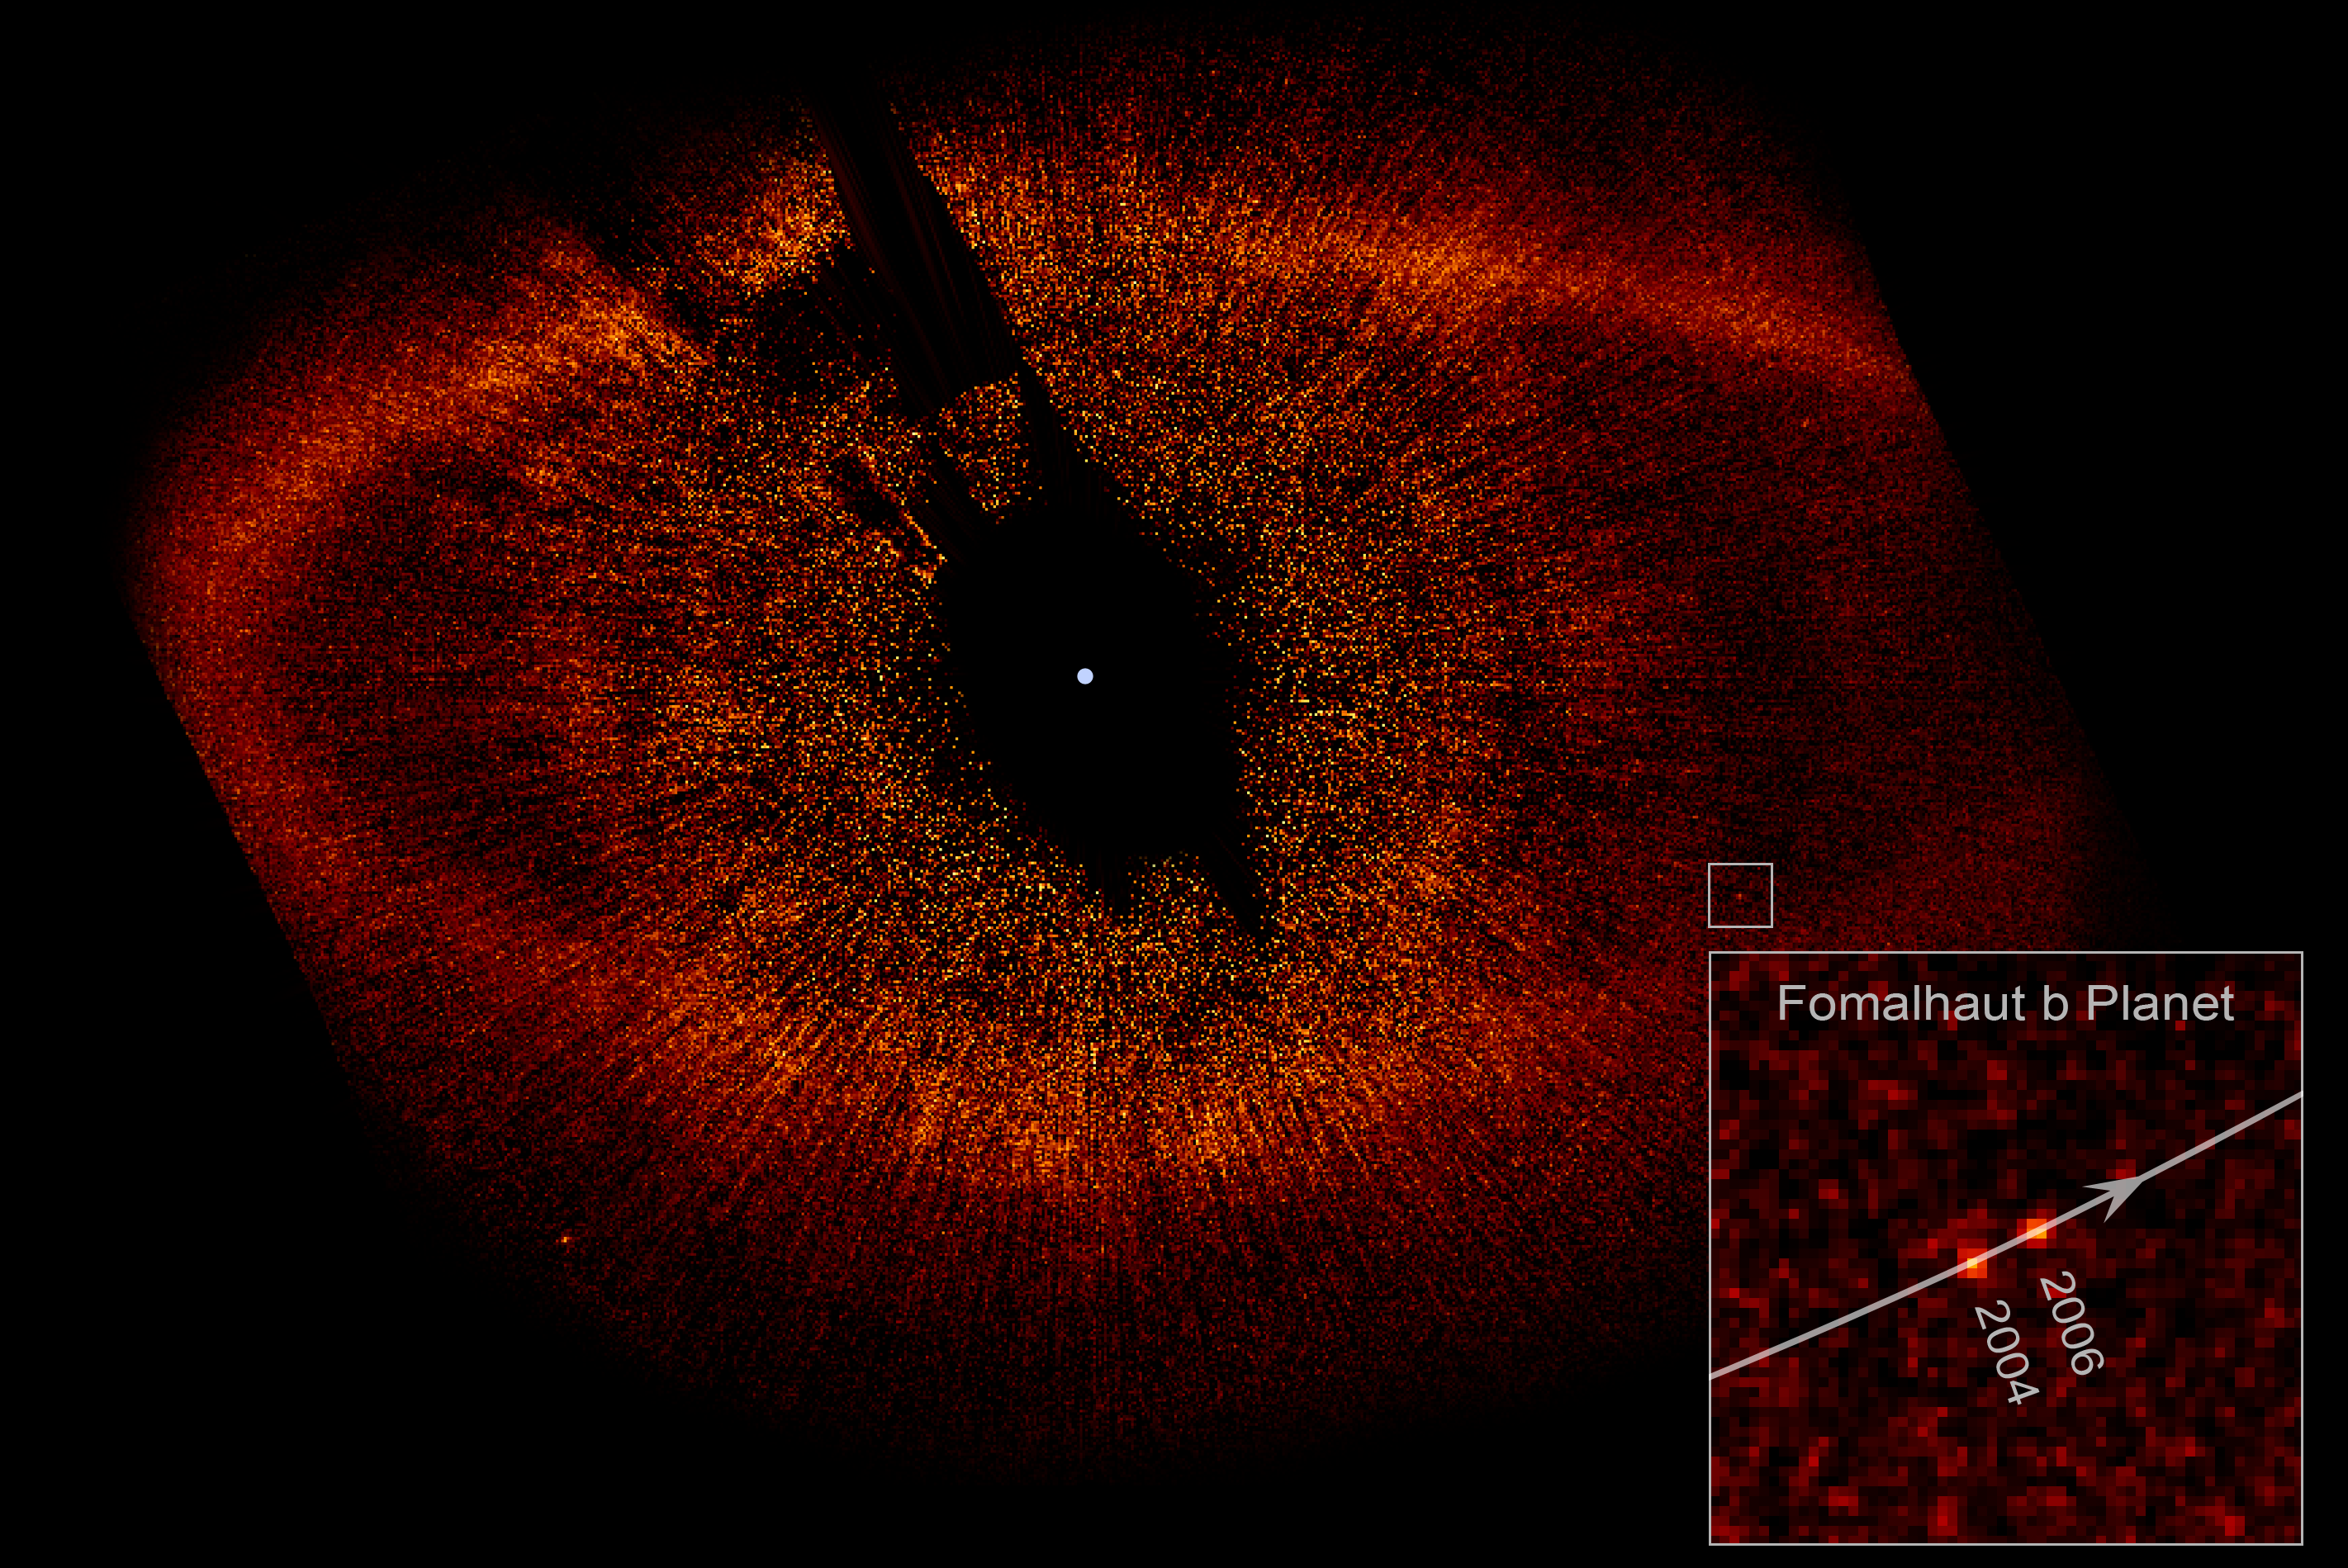

Fomalhaut and Fomalhaut b

This image, taken with the Advanced Camera for Surveys aboard the NASA/ESA Hubble Space Telescope, shows the newly discovered planet, Fomalhaut b, orbiting its parent star, Fomalhaut.

The small white box at lower right pinpoints the planet's location. Fomalhaut b has carved a path along the inner edge of a vast, dusty debris ring encircling Fomalhaut that is 34.5 billion kilometres across. Fomalhaut b lies three billion kilometres inside the ring's inner edge and orbits 17 billion kilometres from its star.

The inset at bottom right is a composite image showing the planet's position during Hubble observations taken in 2004 and 2006. Astronomers have calculated that Fomalhaut b completes an orbit around its parent star every 872 years.

The white dot in the centre of the image marks the star's location. The region around Fomalhaut's location is black because astronomers used the Advanced Camera's coronagraph to block out the star's bright glare so that the dim planet could be seen. Fomalhaut b is 100 million times fainter than its star. The radial streaks are scattered starlight. The red dot at lower left is a background star.

The Fomalhaut system is 25 light-years away in the constellation Piscis Austrinus.

This false-colour image was taken in October 2004 and July 2006.

Credit: NASA, ESA and P. Kalas (University of California, Berkeley, USA)